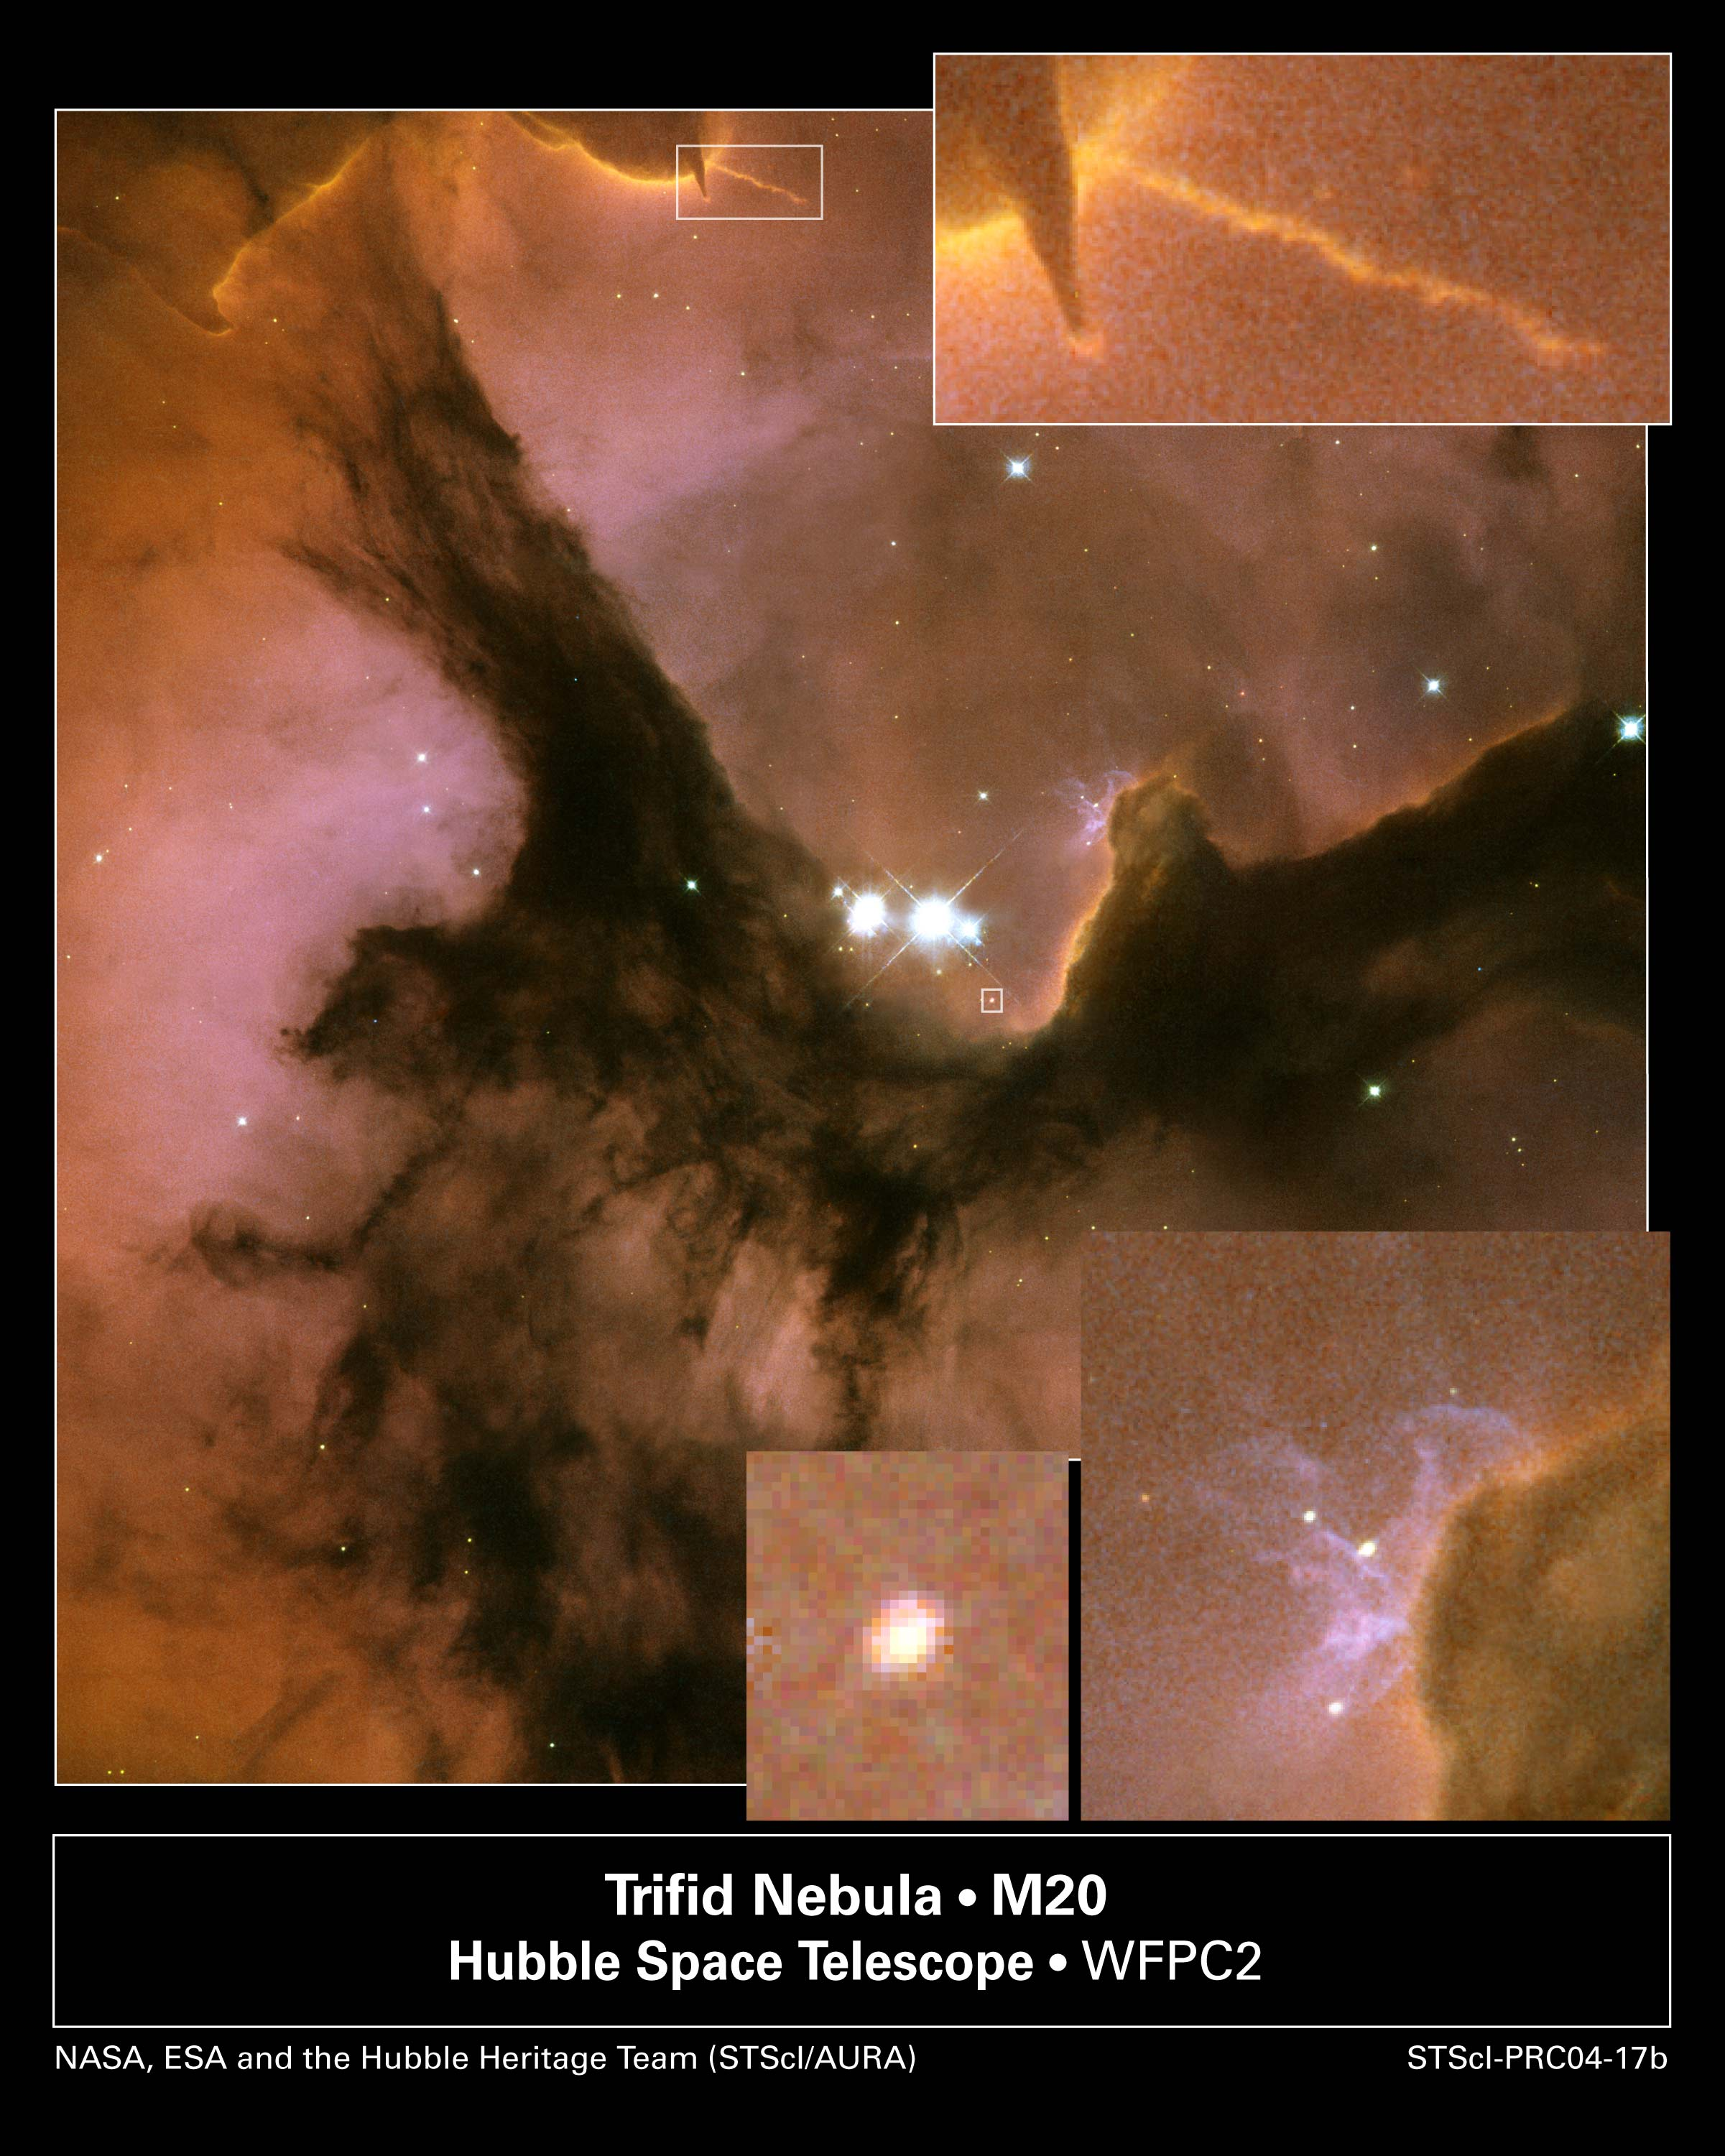

New Hubble image reveals details in the heart of the Trifid Nebula

Three huge intersecting dark lanes of interstellar dust make the Trifid Nebula one of the most recognizable and striking star birth regions in the night sky. The dust, silhouetted against glowing gas and illuminated by starlight, cradles the bright stars at the heart of the Trifid Nebula. This nebula, also known as Messier 20 and NGC 6514, lies within our own Milky Way Galaxy about 9,000 light-years (2,700 parsecs) from Earth, in the constellation Sagittarius.

Credit: NASA, ESA, and The Hubble Heritage Team (AURA/STScI)